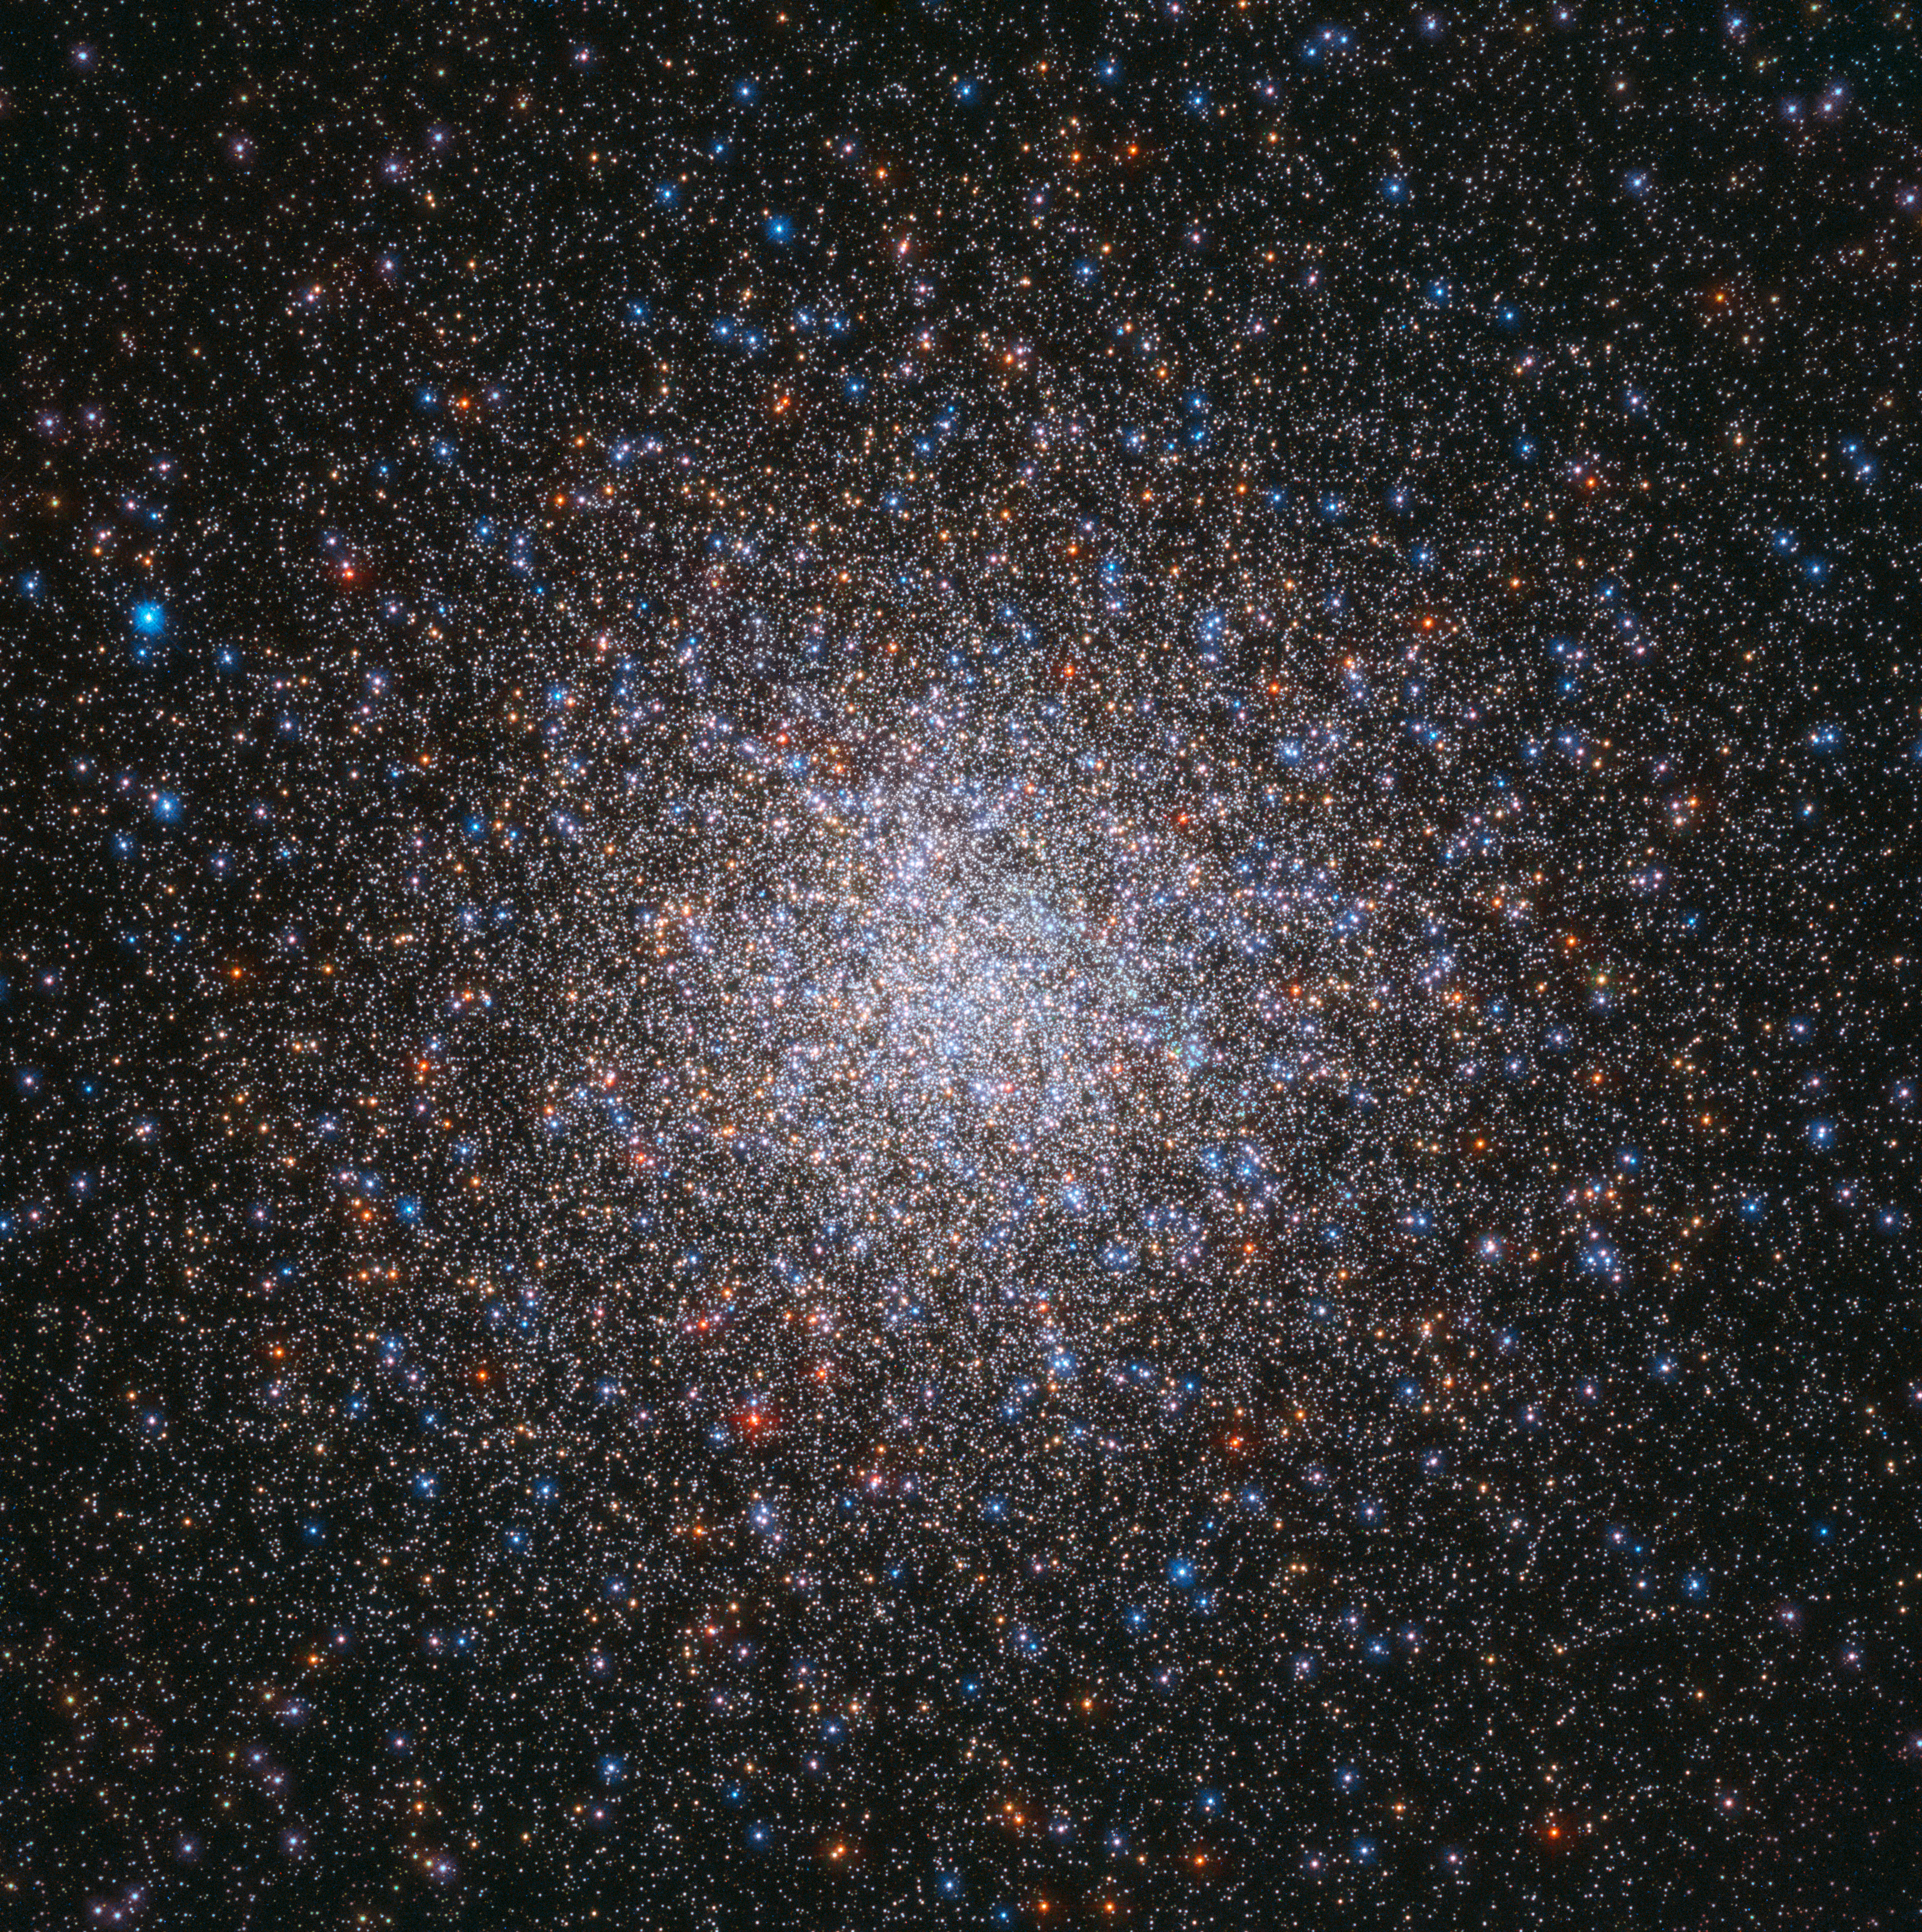

The largest of its kind

Star clusters are commonly featured in cosmic photoshoots, and are also well-loved by the keen eye of the NASA/ESA Hubble Space Telescope. These large gatherings of celestial gems are striking sights — and the subject of this Picture of the Week, Messier 2, is certainly no exception.

Messier 2 is located in the constellation of Aquarius (The Water-Bearer), about 55 000 light-years away. It is a globular cluster, a spherical group of stars all tightly bound together by gravity. With a diameter of roughly 175 light-years, a population of 150 000 stars, and an age of 13 billion years, Messier 2 is one of the largest clusters of its kind and one of the oldest associated with the Milky Way.

Most of the cluster’s mass is concentrated at its centre, with shimmering streams of stars extending outwards into space. It is bright enough that it can even be seen with the naked eye when observing conditions are extremely good.

Credit: ESA/Hubble & NASA, G. Piotto et al.